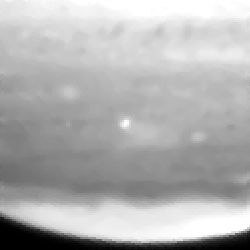

Fragment a impact site

This image shows the fragment A impact site.

Credit: Hubble Space Telescope Comet Team, and NASA/ESA